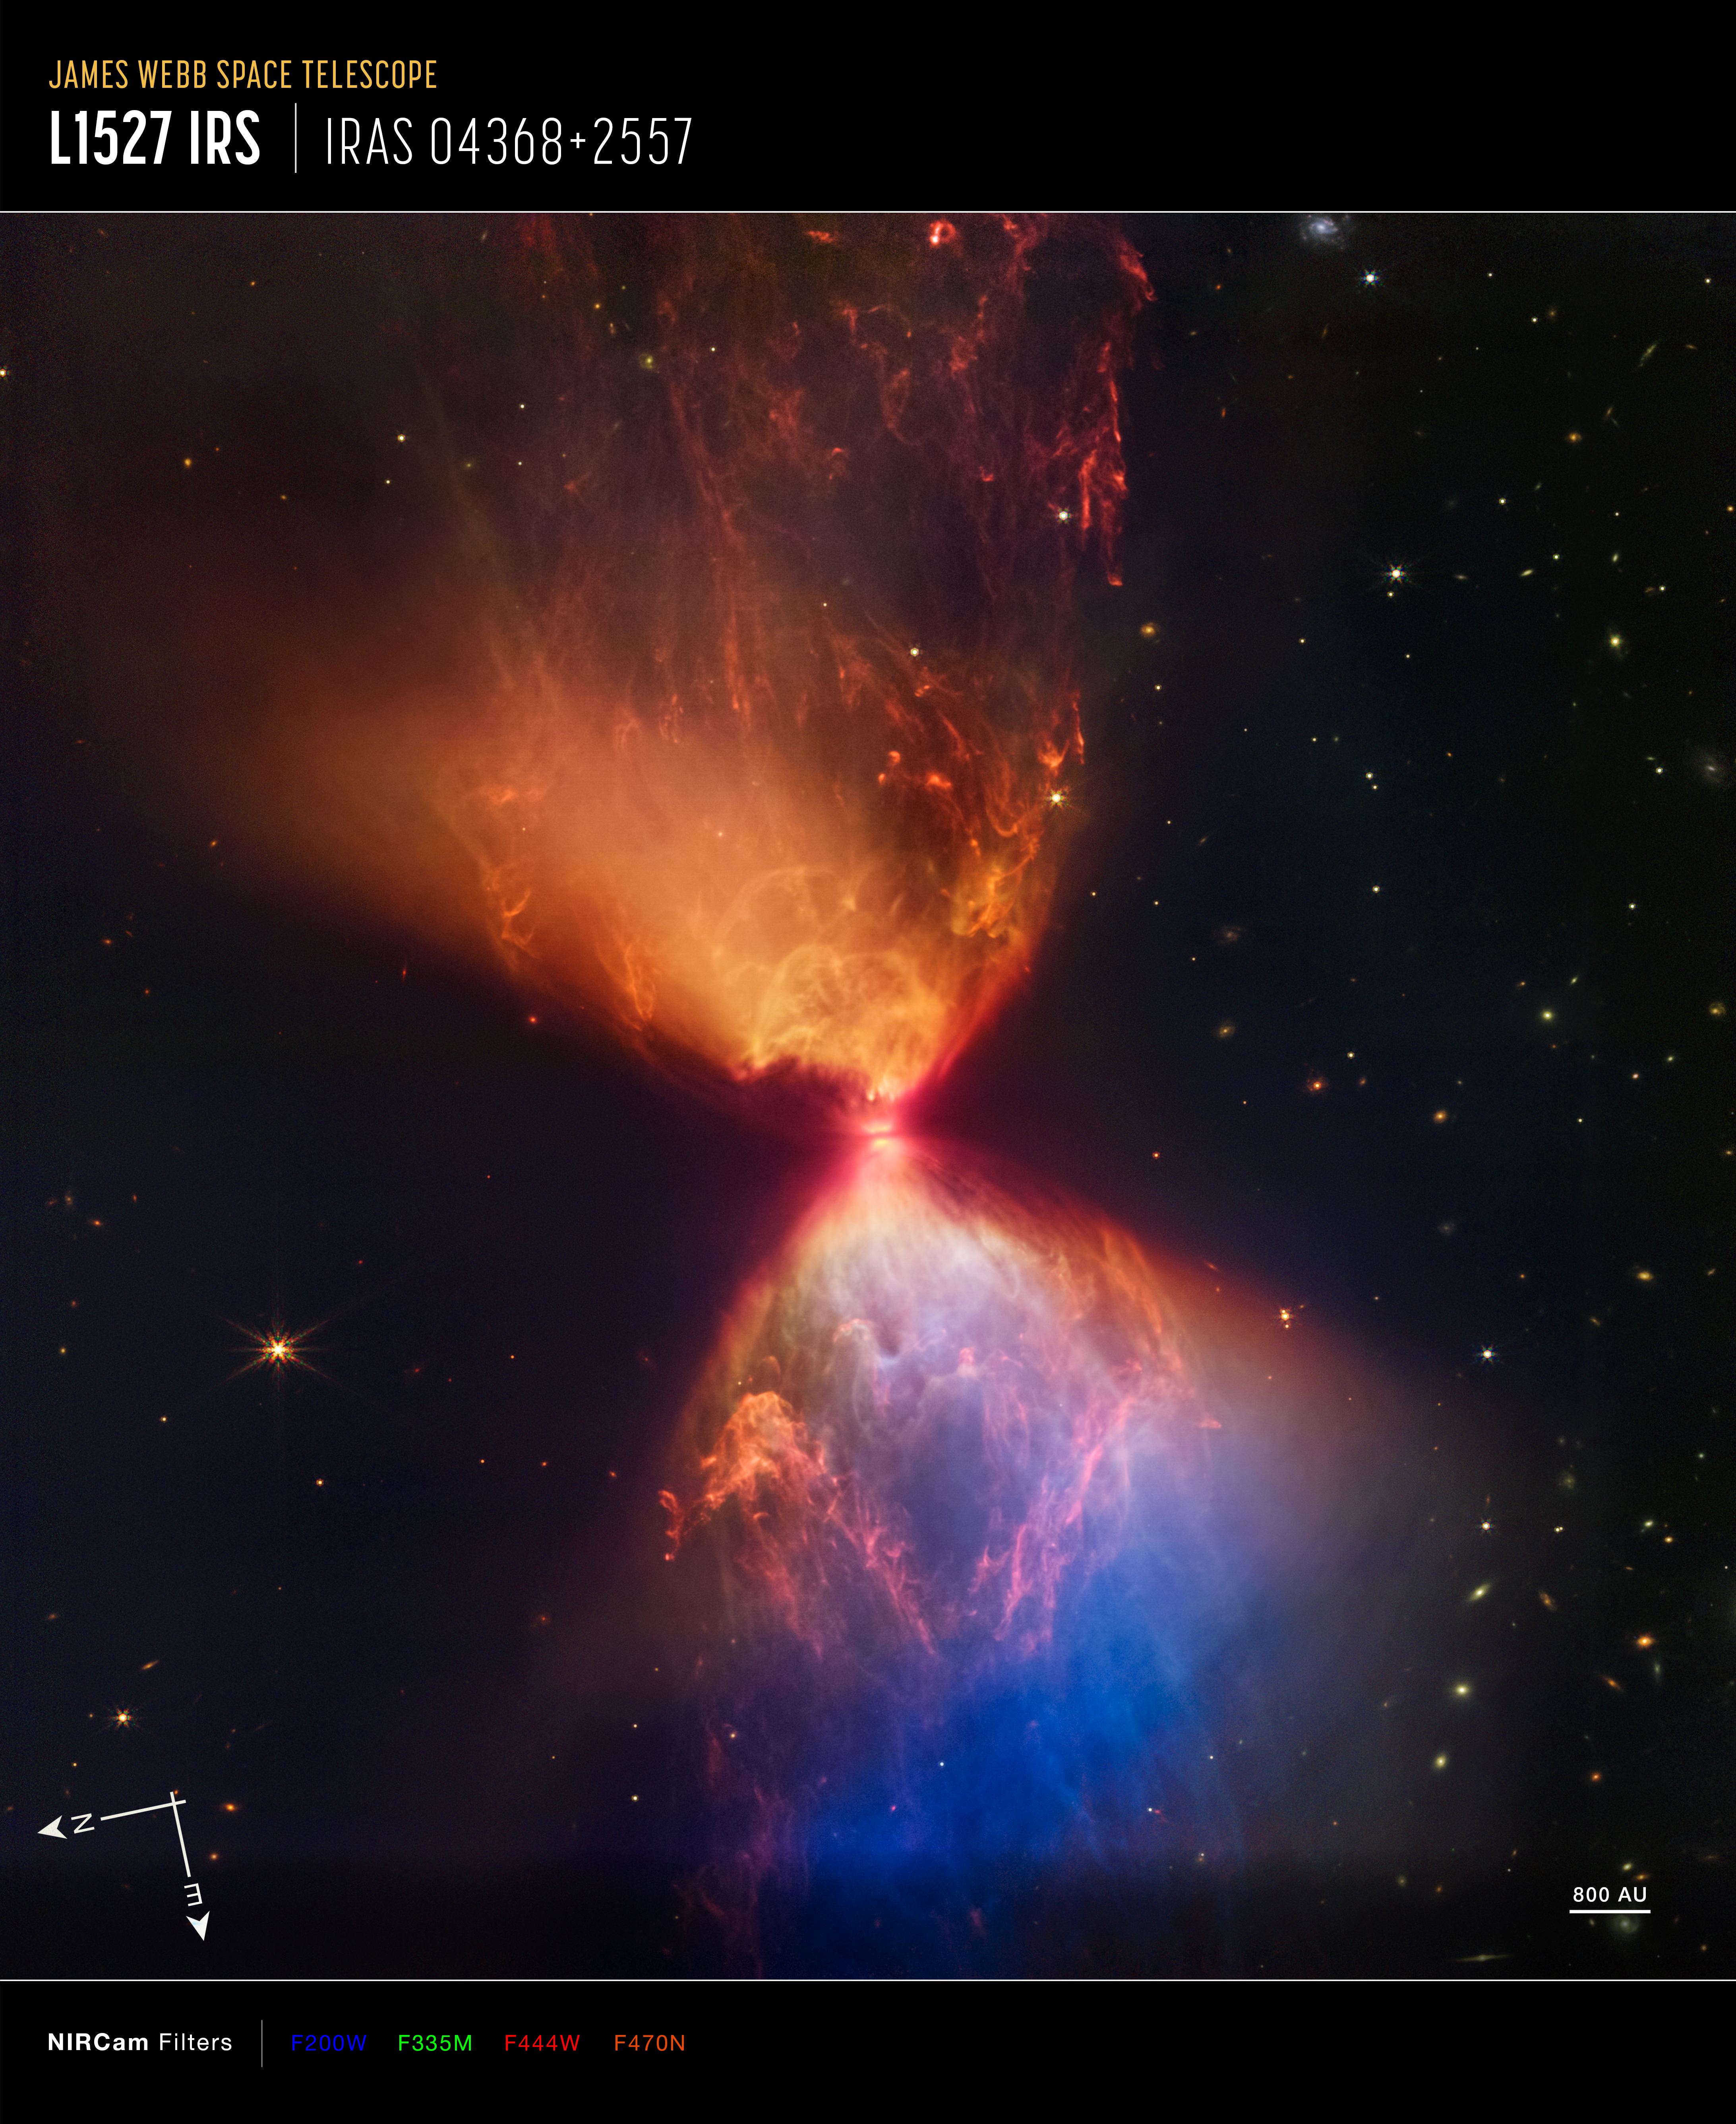

Protostar L1527 (Annotated)

This image of the nebula L1527, captured by Webb’s Near-Infrared Camera (NIRCam), shows compass arrows, scale bar, and colour key for reference.

The north and east compass arrows show the orientation of the image on the sky. Note that the relationship between north and east on the sky (as seen from below) is flipped relative to direction arrows on a map of the ground (as seen from above).

The scale bar is labelled in astronomical units (au), which is the average distance between Earth and the Sun, or 150 million kilometres.

This image shows invisible near-infrared wavelengths of light that have been translated into visible-light colours. The colour key shows which NIRCam filters were used when collecting the light. The name of each filter is shown in the visible light colour used to represent the infrared light that passes through that filter.

Credit: NASA, ESA, CSA, and STScI, J. DePasquale (STScI)